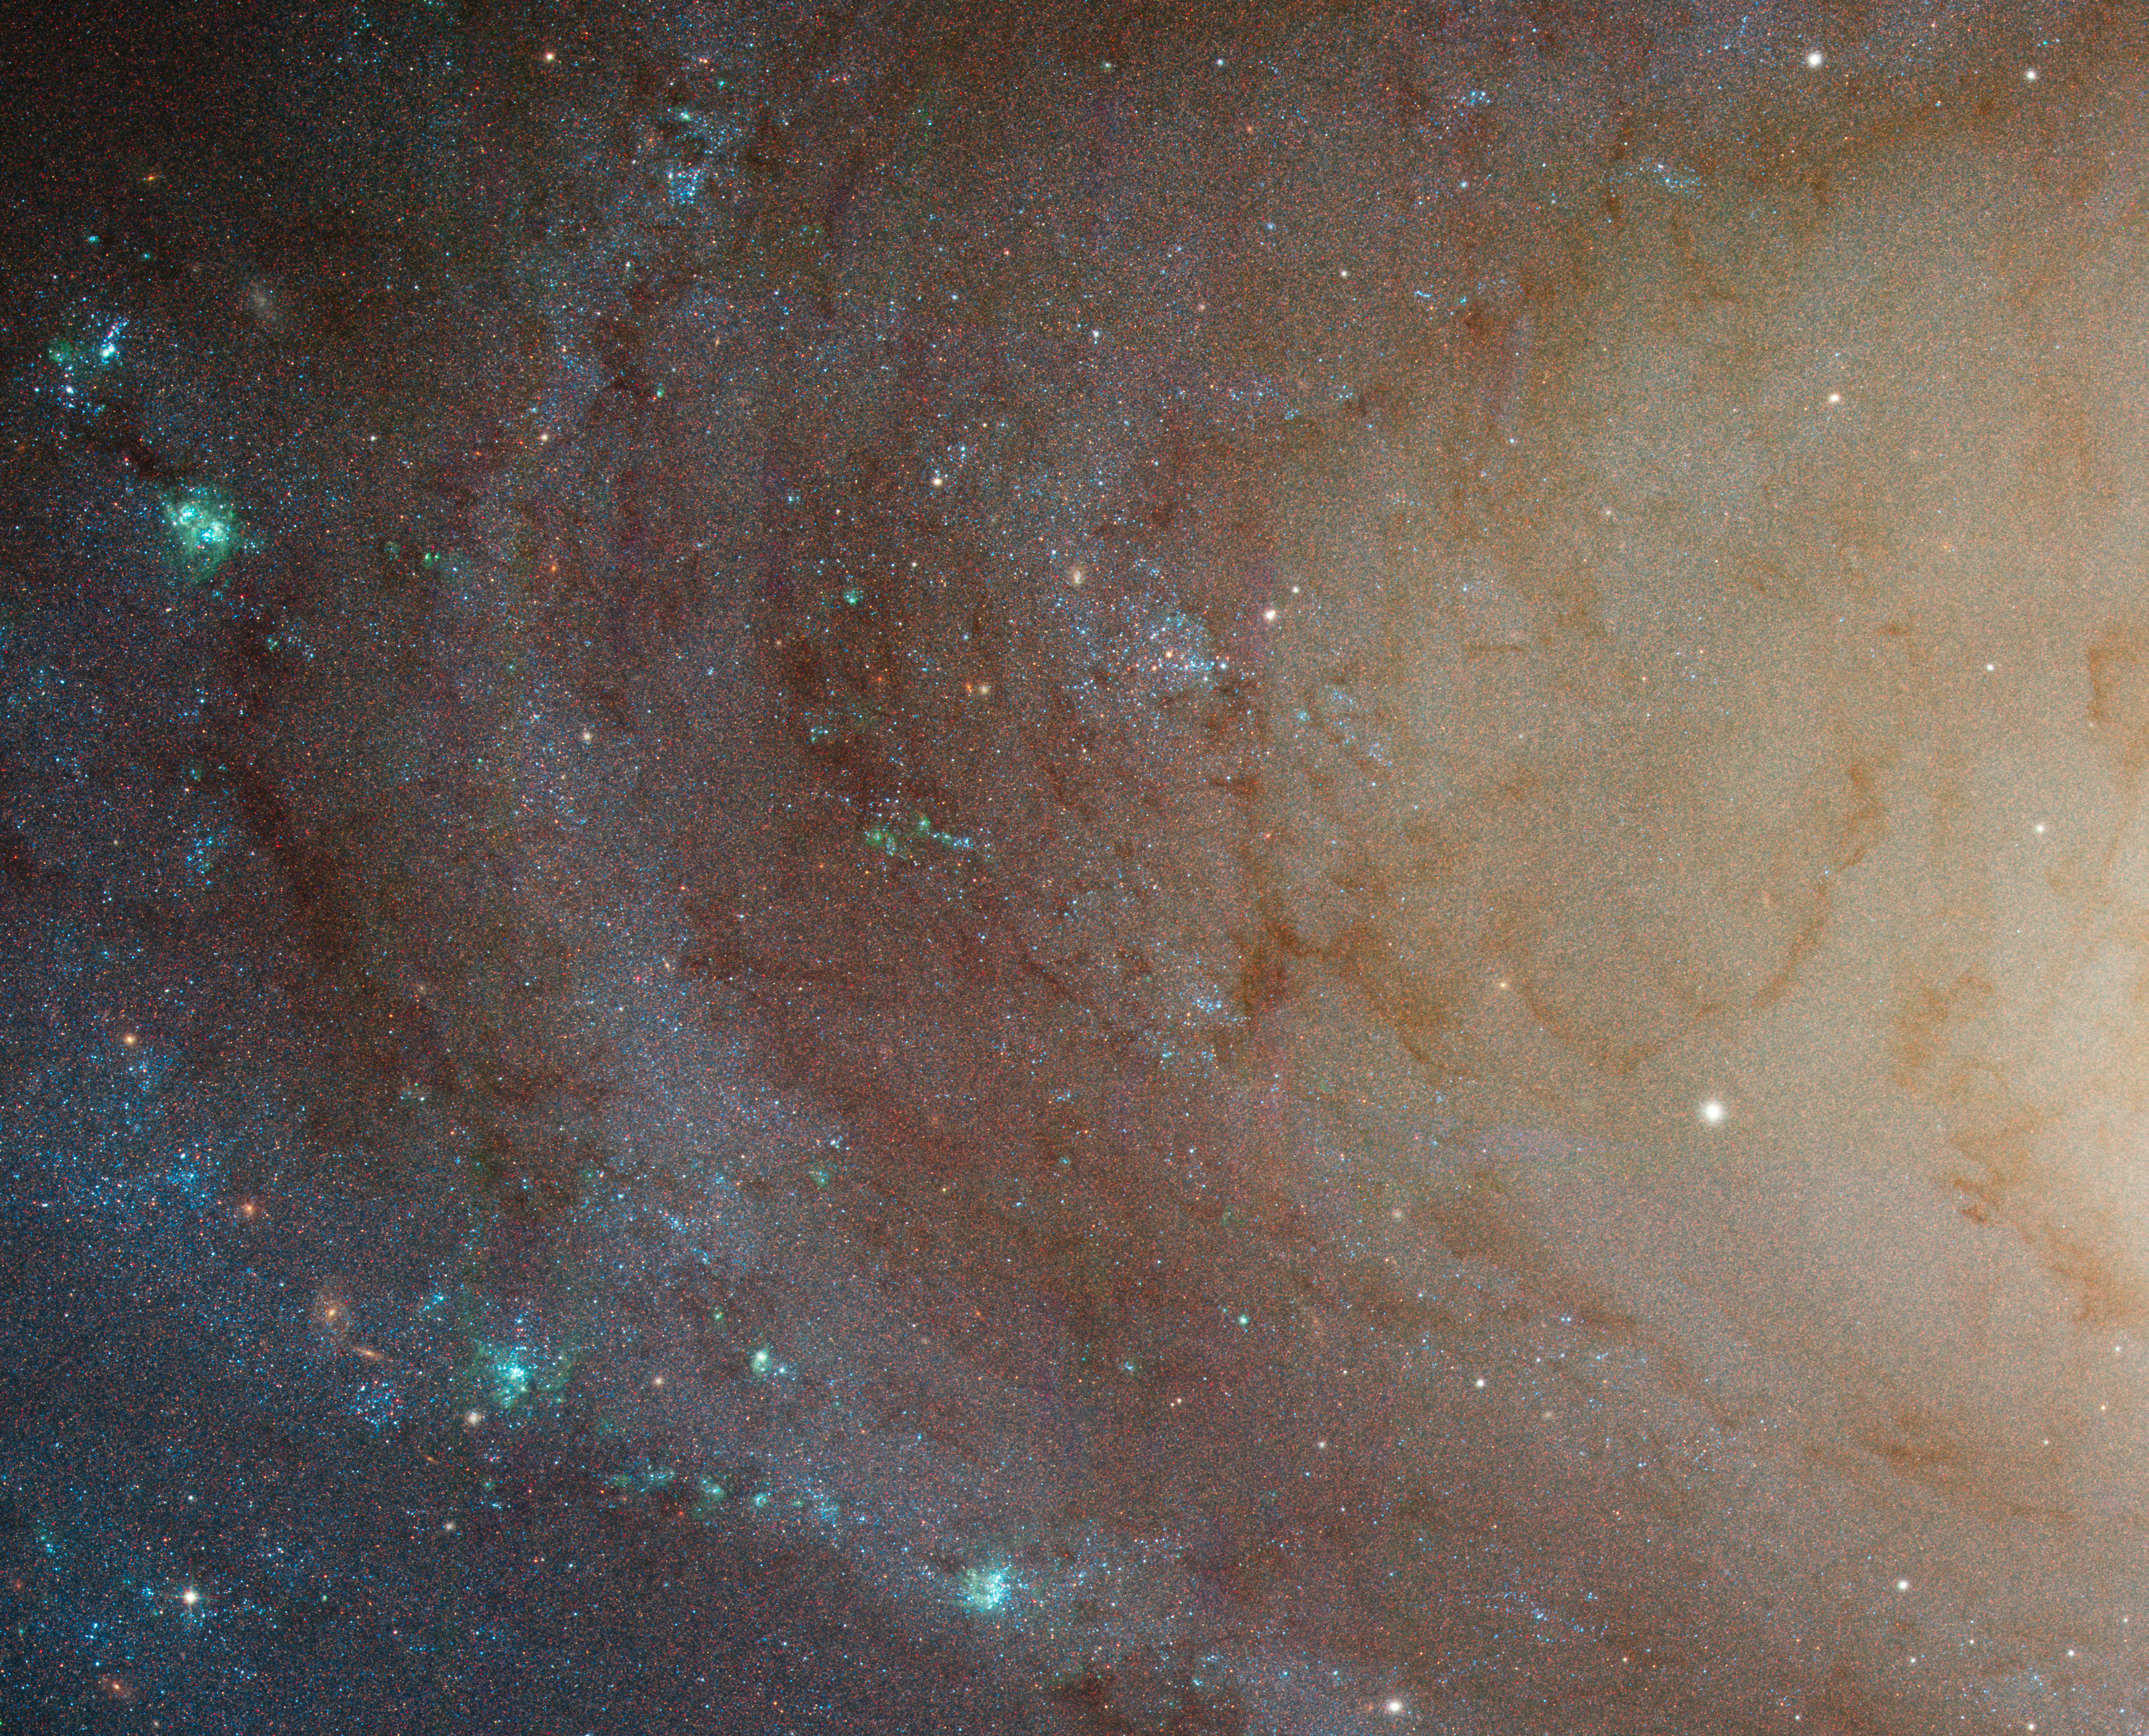

Spiral Galaxy M81 Details 4

Bulge-disk transition in M81 and chain of HII regions.

Credit: NASA, ESA and the Hubble Heritage Team (STScI/AURA). Acknowledgment: A. Zezas and J. Huchra (Harvard-Smithsonian Center for Astrophysics)